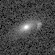

Galaxies: snapshots in time

Single images from the Galaxies: Snapshots in Time collage.

Credit: NASA & ESA